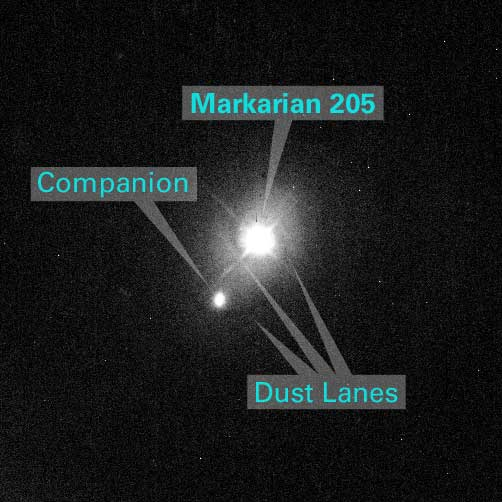

Annotated image of Markarian 205 and companion

This annotated image shows the region of Markarian 205.

Credit: NASA/ESA and Z. Levay (STScI)